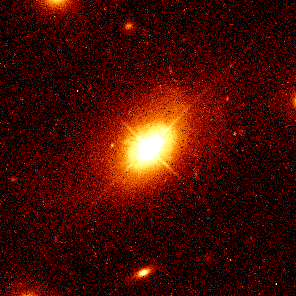

Quasar PHL 909

Quasar PHL 909 is 1.5 billion light-years from Earth and lies at the core of an apparently normal elliptical galaxy.

Credit: John Bahcall (Institute for Advanced Study, Princeton) Mike Disney (University of Wales) and NASA/ESA